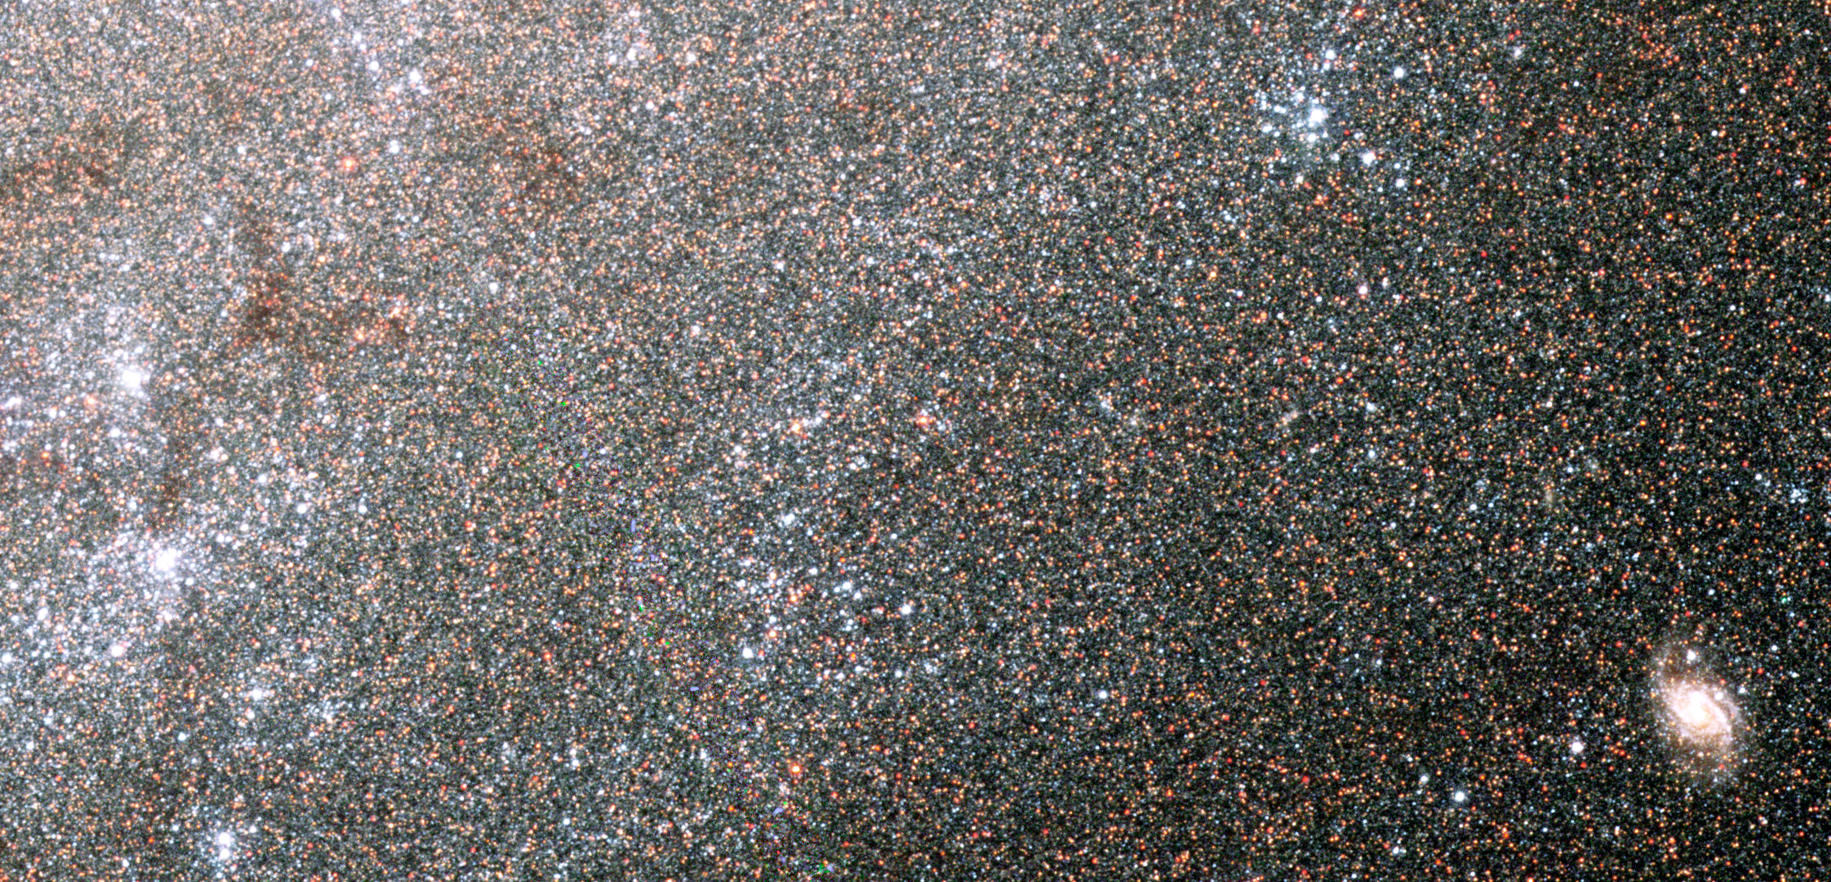

Grains of cosmic sand

Myriads of stars embedded in the heart of the nearby galaxy NGC 300 can be singled out like grains of sand on a beach in this Hubble Space Telescope image. The Hubble telescope's exquisite resolution enables it to see the stars as individual points of light, despite the fact that the galaxy is millions of light-years away.

NGC 300 is a spiral galaxy similar to our own Milky Way galaxy. It is a member of a nearby group of galaxies known as the Sculptor group, named for the southern constellation where the group can be found. The distance to NGC 300 is 6.5 million light-years, making it one of the Milky Way's closer neighbors. At this distance, only the brightest stars can be picked out from ground-based images. With a resolution some 10 times better than ground-based telescopes, Hubble's Advanced Camera for Surveys (ACS) resolves many more stars in this galaxy than can be detected from the ground.

The colour composite was made from filtered images taken in blue, green, and infrared light. Hot, young blue stars appear in clusters that form in the galaxy's spiral arms. Ribbons of deep red stars mark the location of gauzy curtains of dust that partially hide the light of the stars behind them. Near the center of the image is the bright and compact nucleus of the galaxy where even the ACS loses the ability to separate the densely packed stars.

The individual exposures that were combined to make this new image were taken in July and September 2002. These Hubble data are being used to test a new method for measuring distances to galaxies and to compare it with the more traditional methods, such as the period-luminosity relationship of pulsating stars known as Cepheid variables. Measuring distances is a perpetual but important concern for astronomers.

Some of the luminous blue specks in this image, young and massive stars called blue supergiants, are among the brightest stars seen in spiral galaxies like NGC 300. By combining the stellar brightness with other information, such as the stellar temperature, surface gravity and mass outflow, astronomers are defining a new technique to measure distances to galaxies located millions of light-years away.

Credit: NASA, ESA, and The Hubble Heritage Team (AURA/STScI)